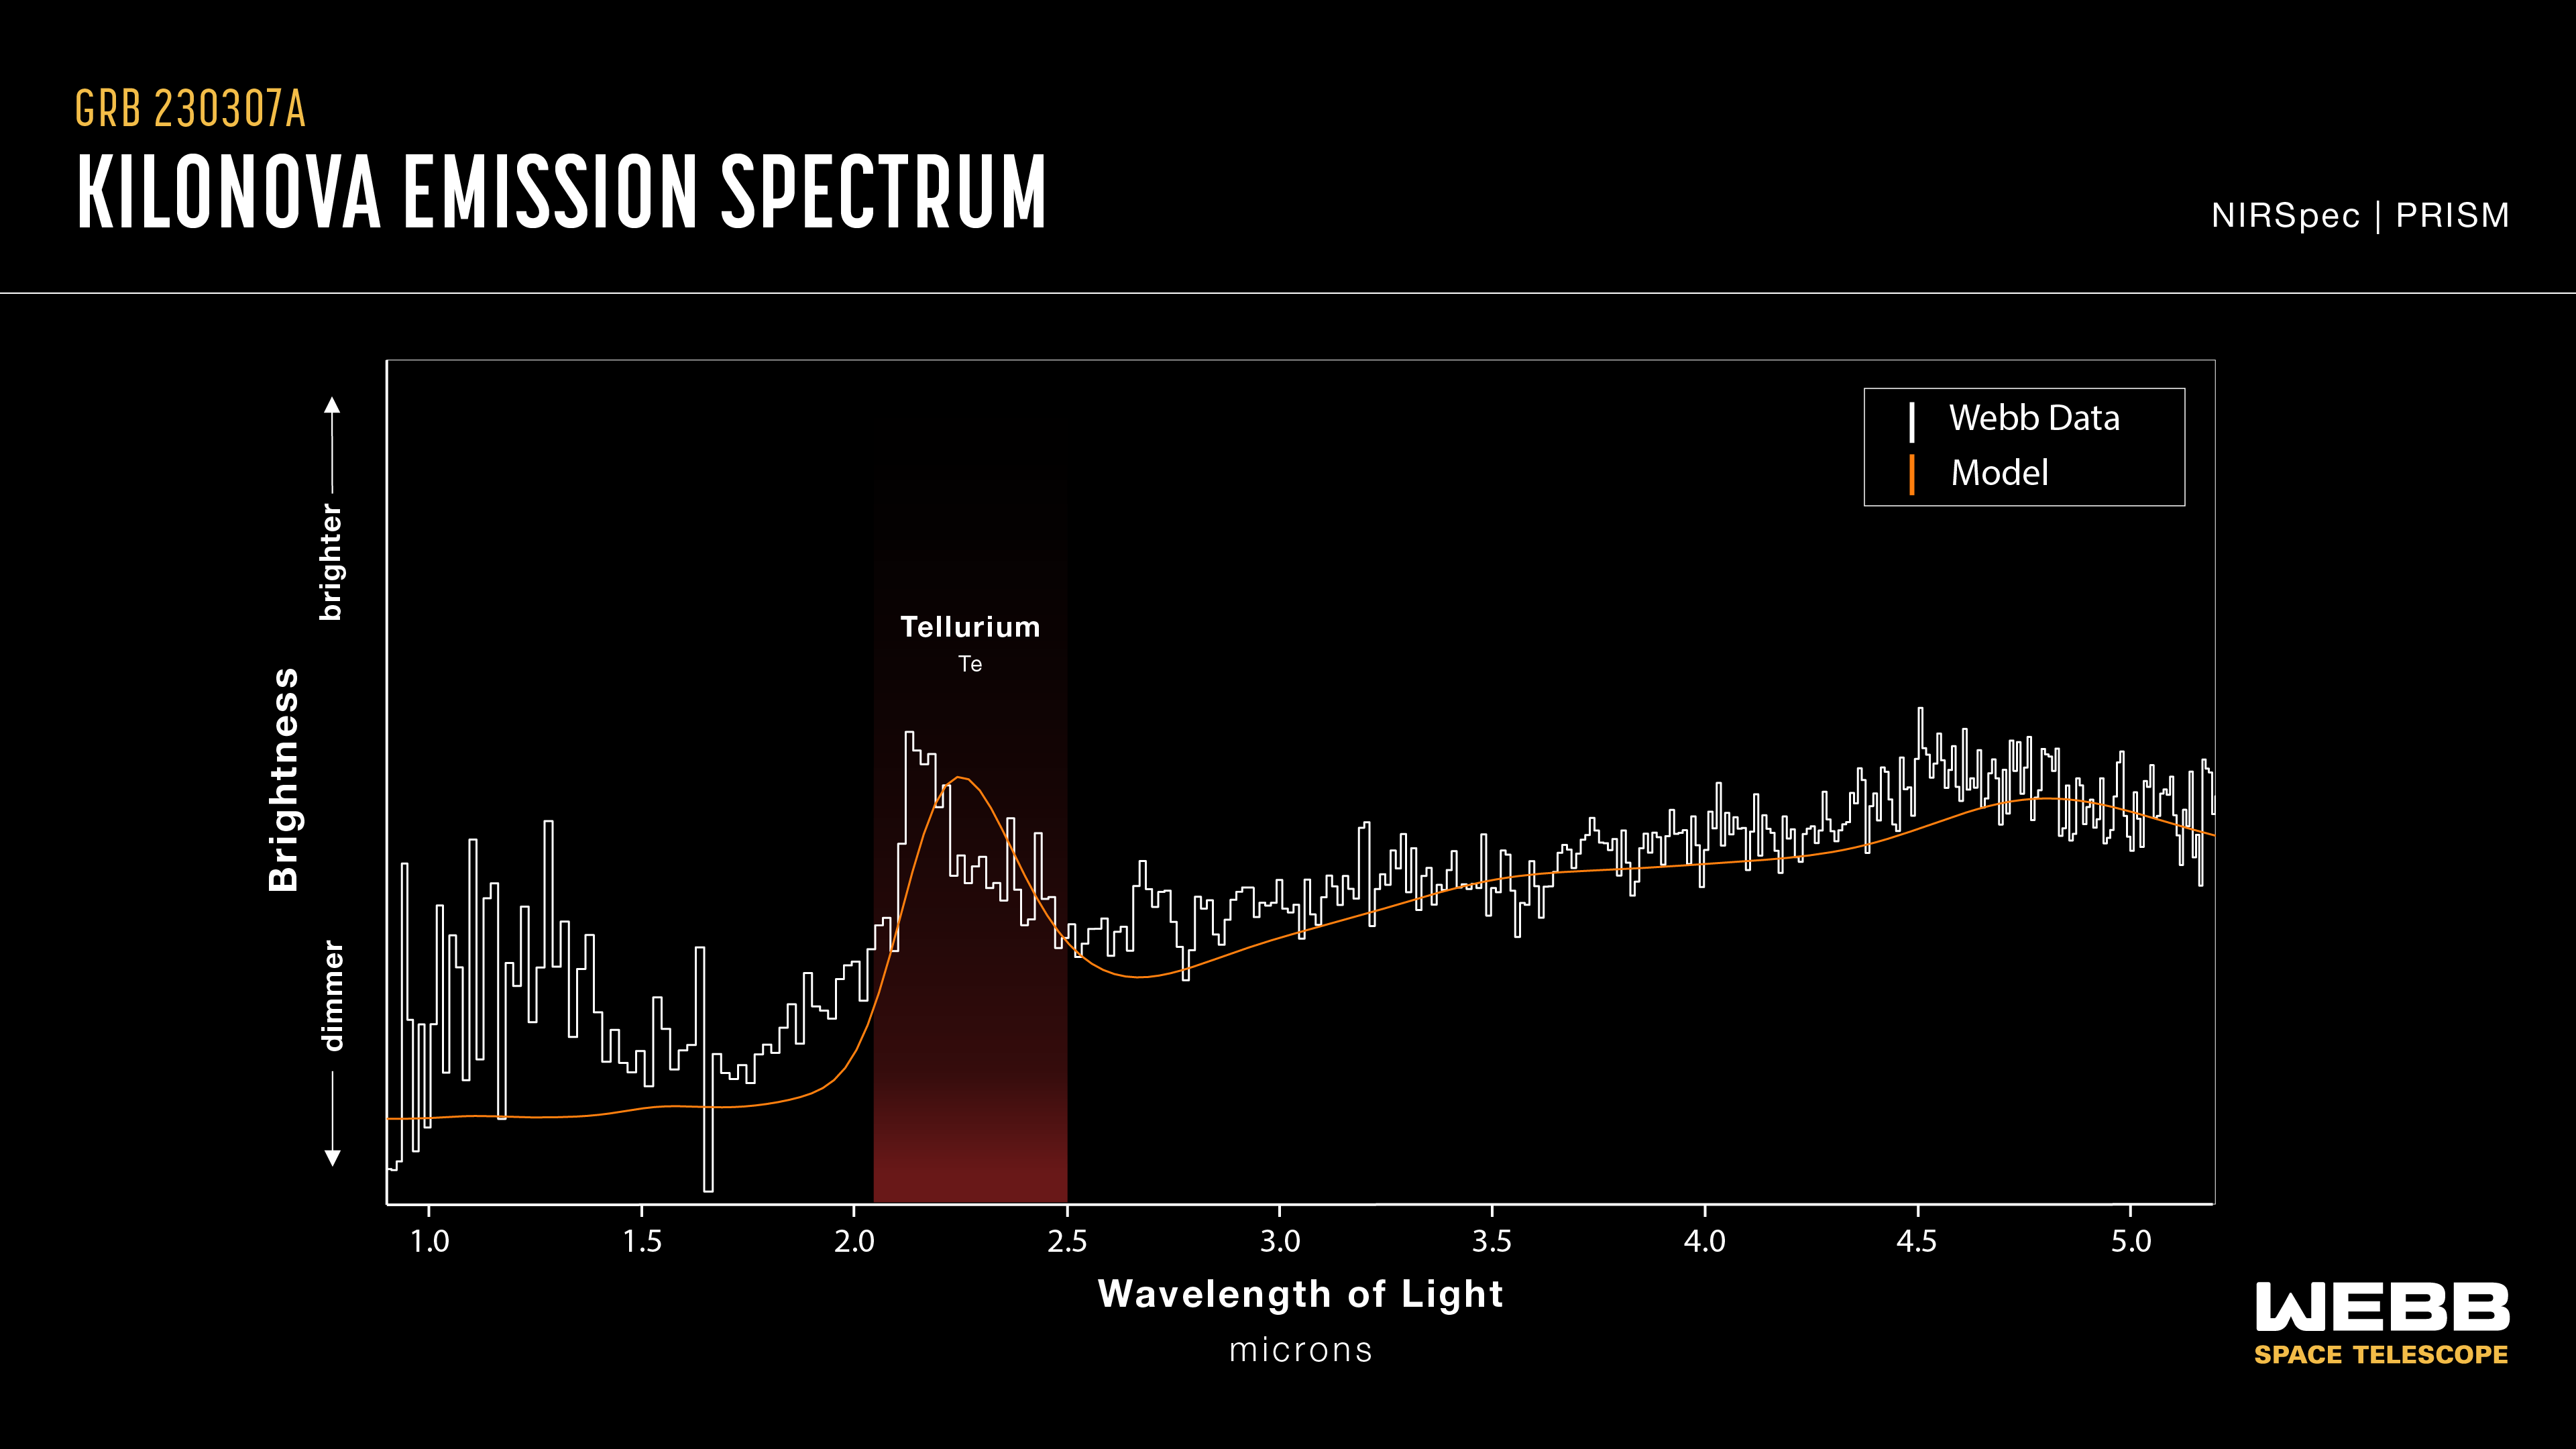

Kilonova emission spectrum

This graphic presentation compares the spectral data of GRB 230307A’s kilonova as observed by the James Webb Space Telescope and a kilonova model. Both show a distinct peak in the region of the spectrum associated with tellurium, with the area shaded in red. The detection of tellurium, which is rarer than platinum on Earth, marks Webb’s first direct look at an individual heavy element from a kilonova.

Though astronomers have theorised neutron star mergers to be the ideal environment to create chemical elements, including some that are essential to life, these explosive events—known as kilonovas—are rare and rapid. Webb’s NIRSpec (Near-Infrared Spectrograph) acquired a spectrum of GRB 230307A’s kilonova, helping scientists secure evidence of the synthesis of heavy elements from neutron star mergers.

With Webb’s extraordinary ability to look further into space than ever before, astronomers expect to find even more kilonovas and acquire further evidence of heavy element creation.

Credit: NASA, ESA, CSA, J. Olmsted (STScI)